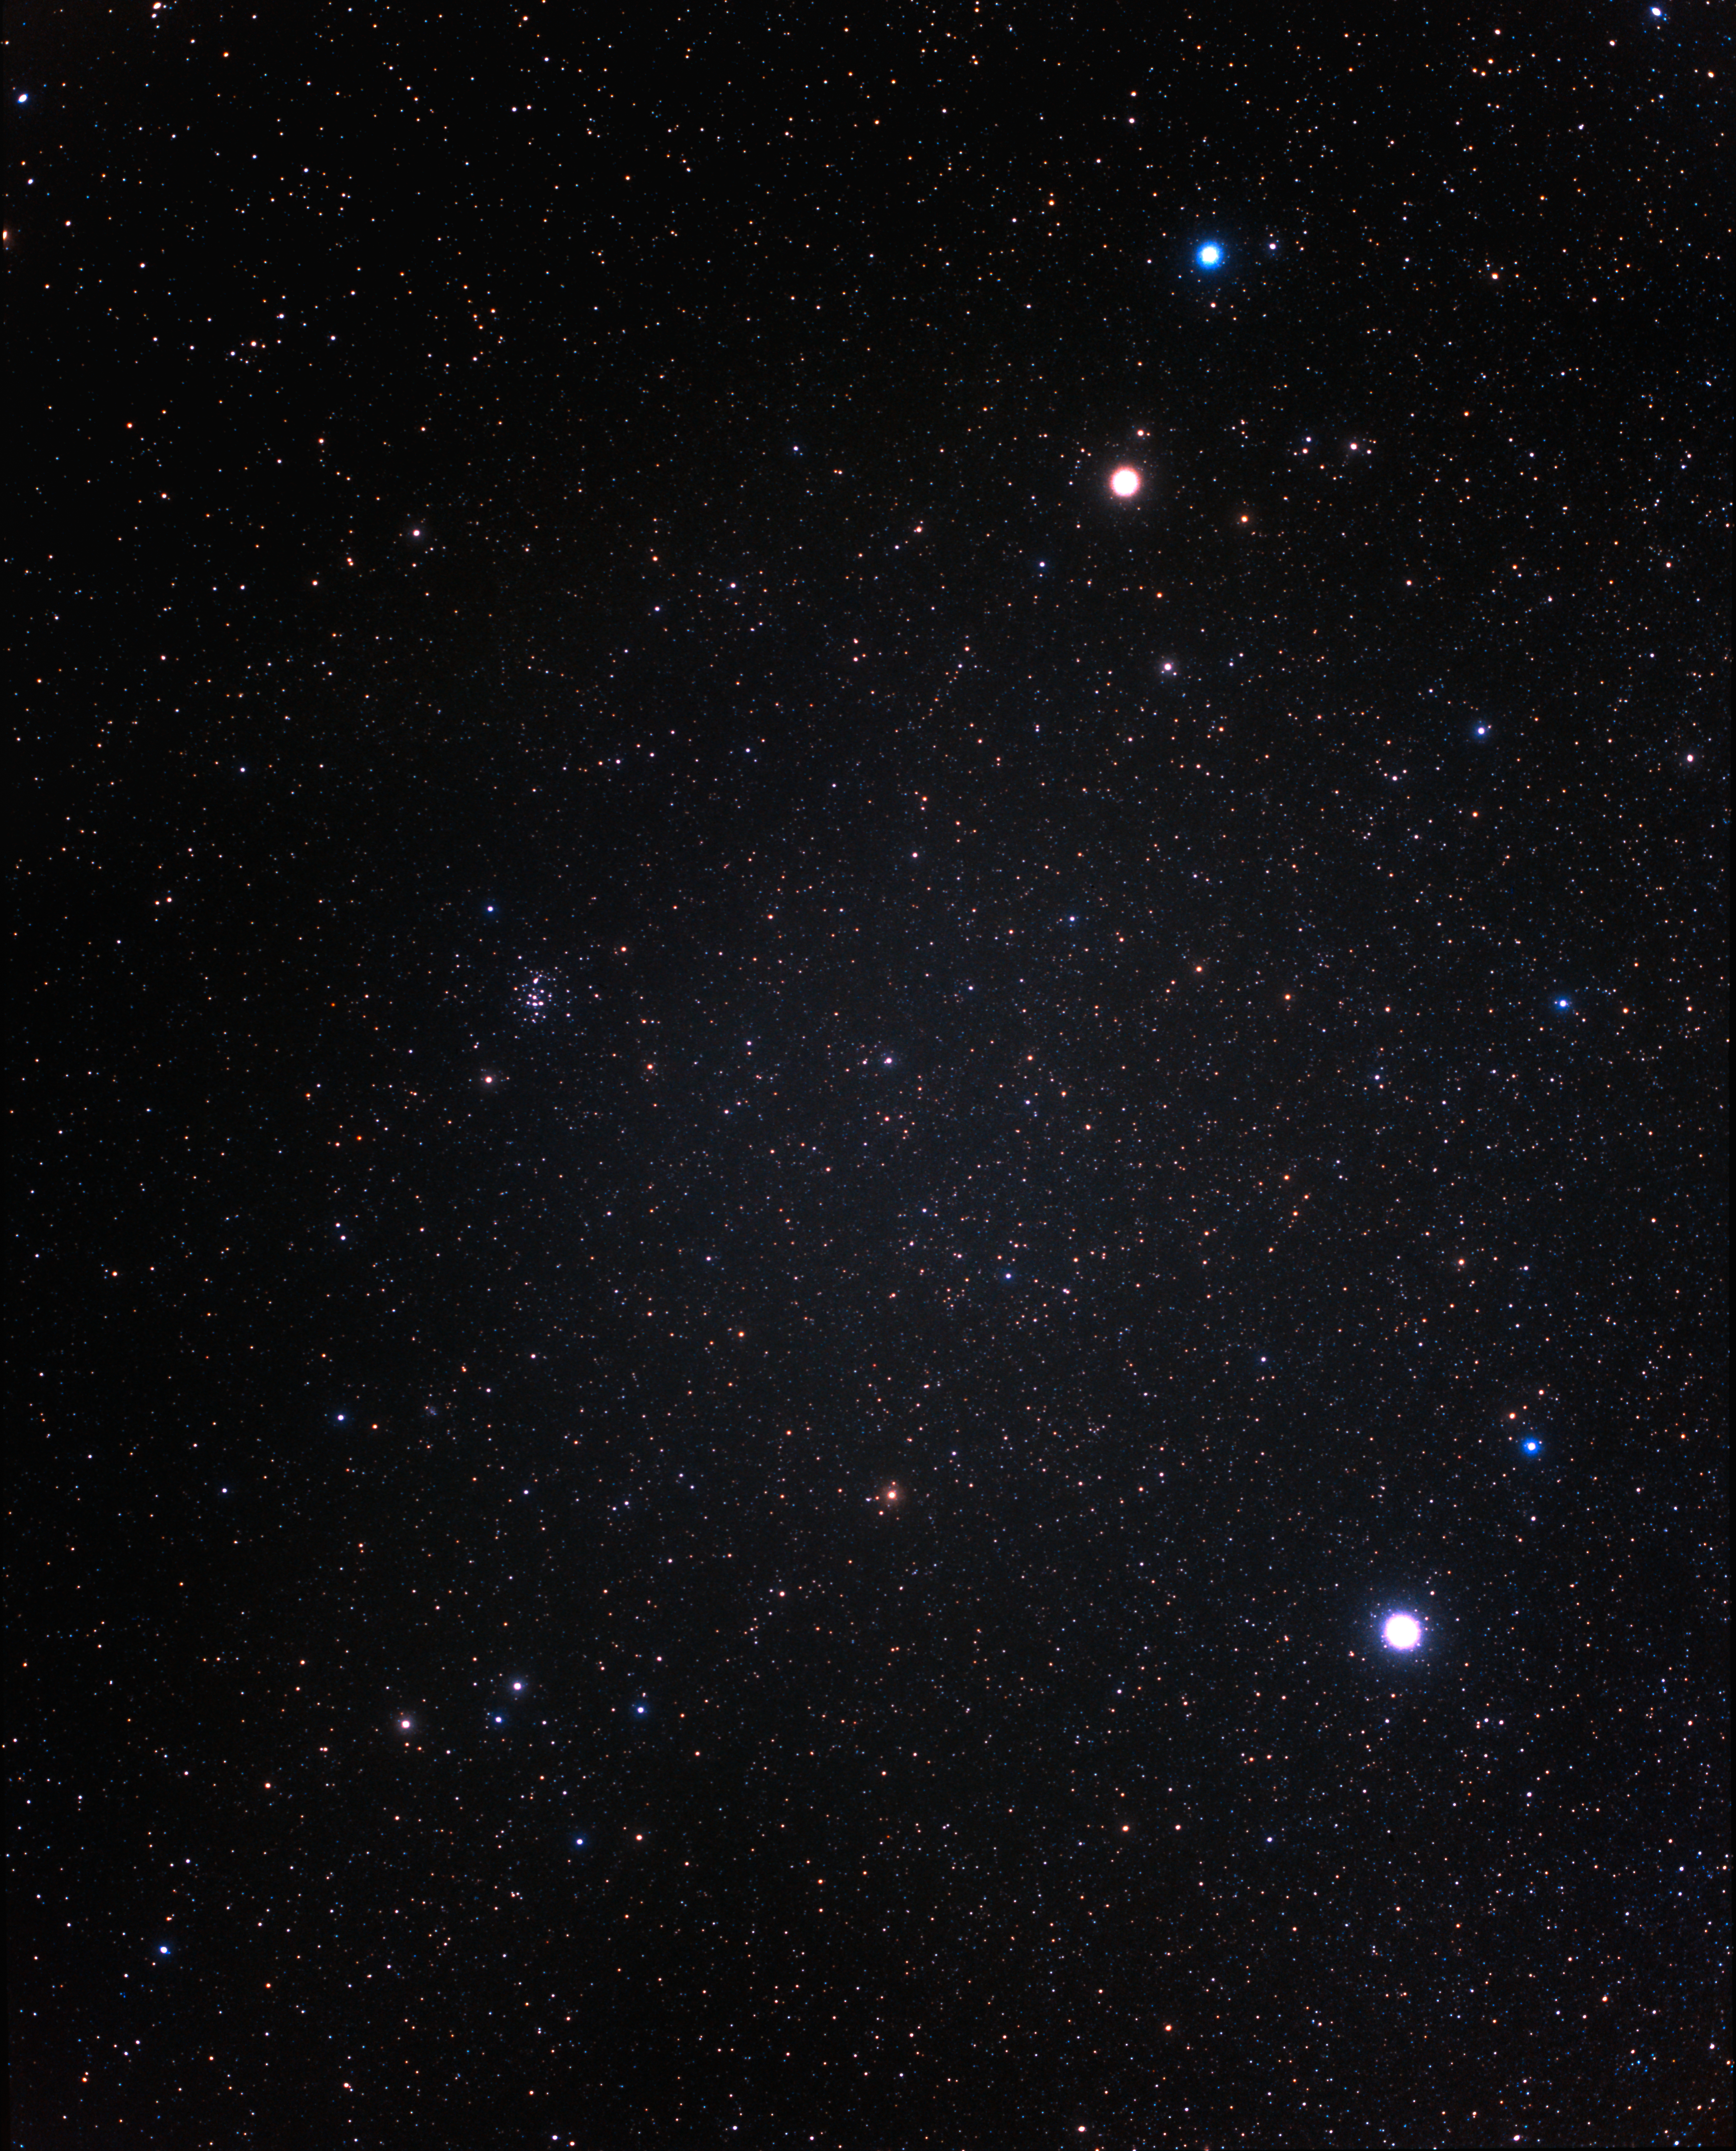

A wide-field view of the constellation of Cancer (ground-based image)

The constellation of Cancer (the Crab) is shown in the centre-left in this picture of the northern sky, taken with a small ground-based camera.

Credit: A. Fujii